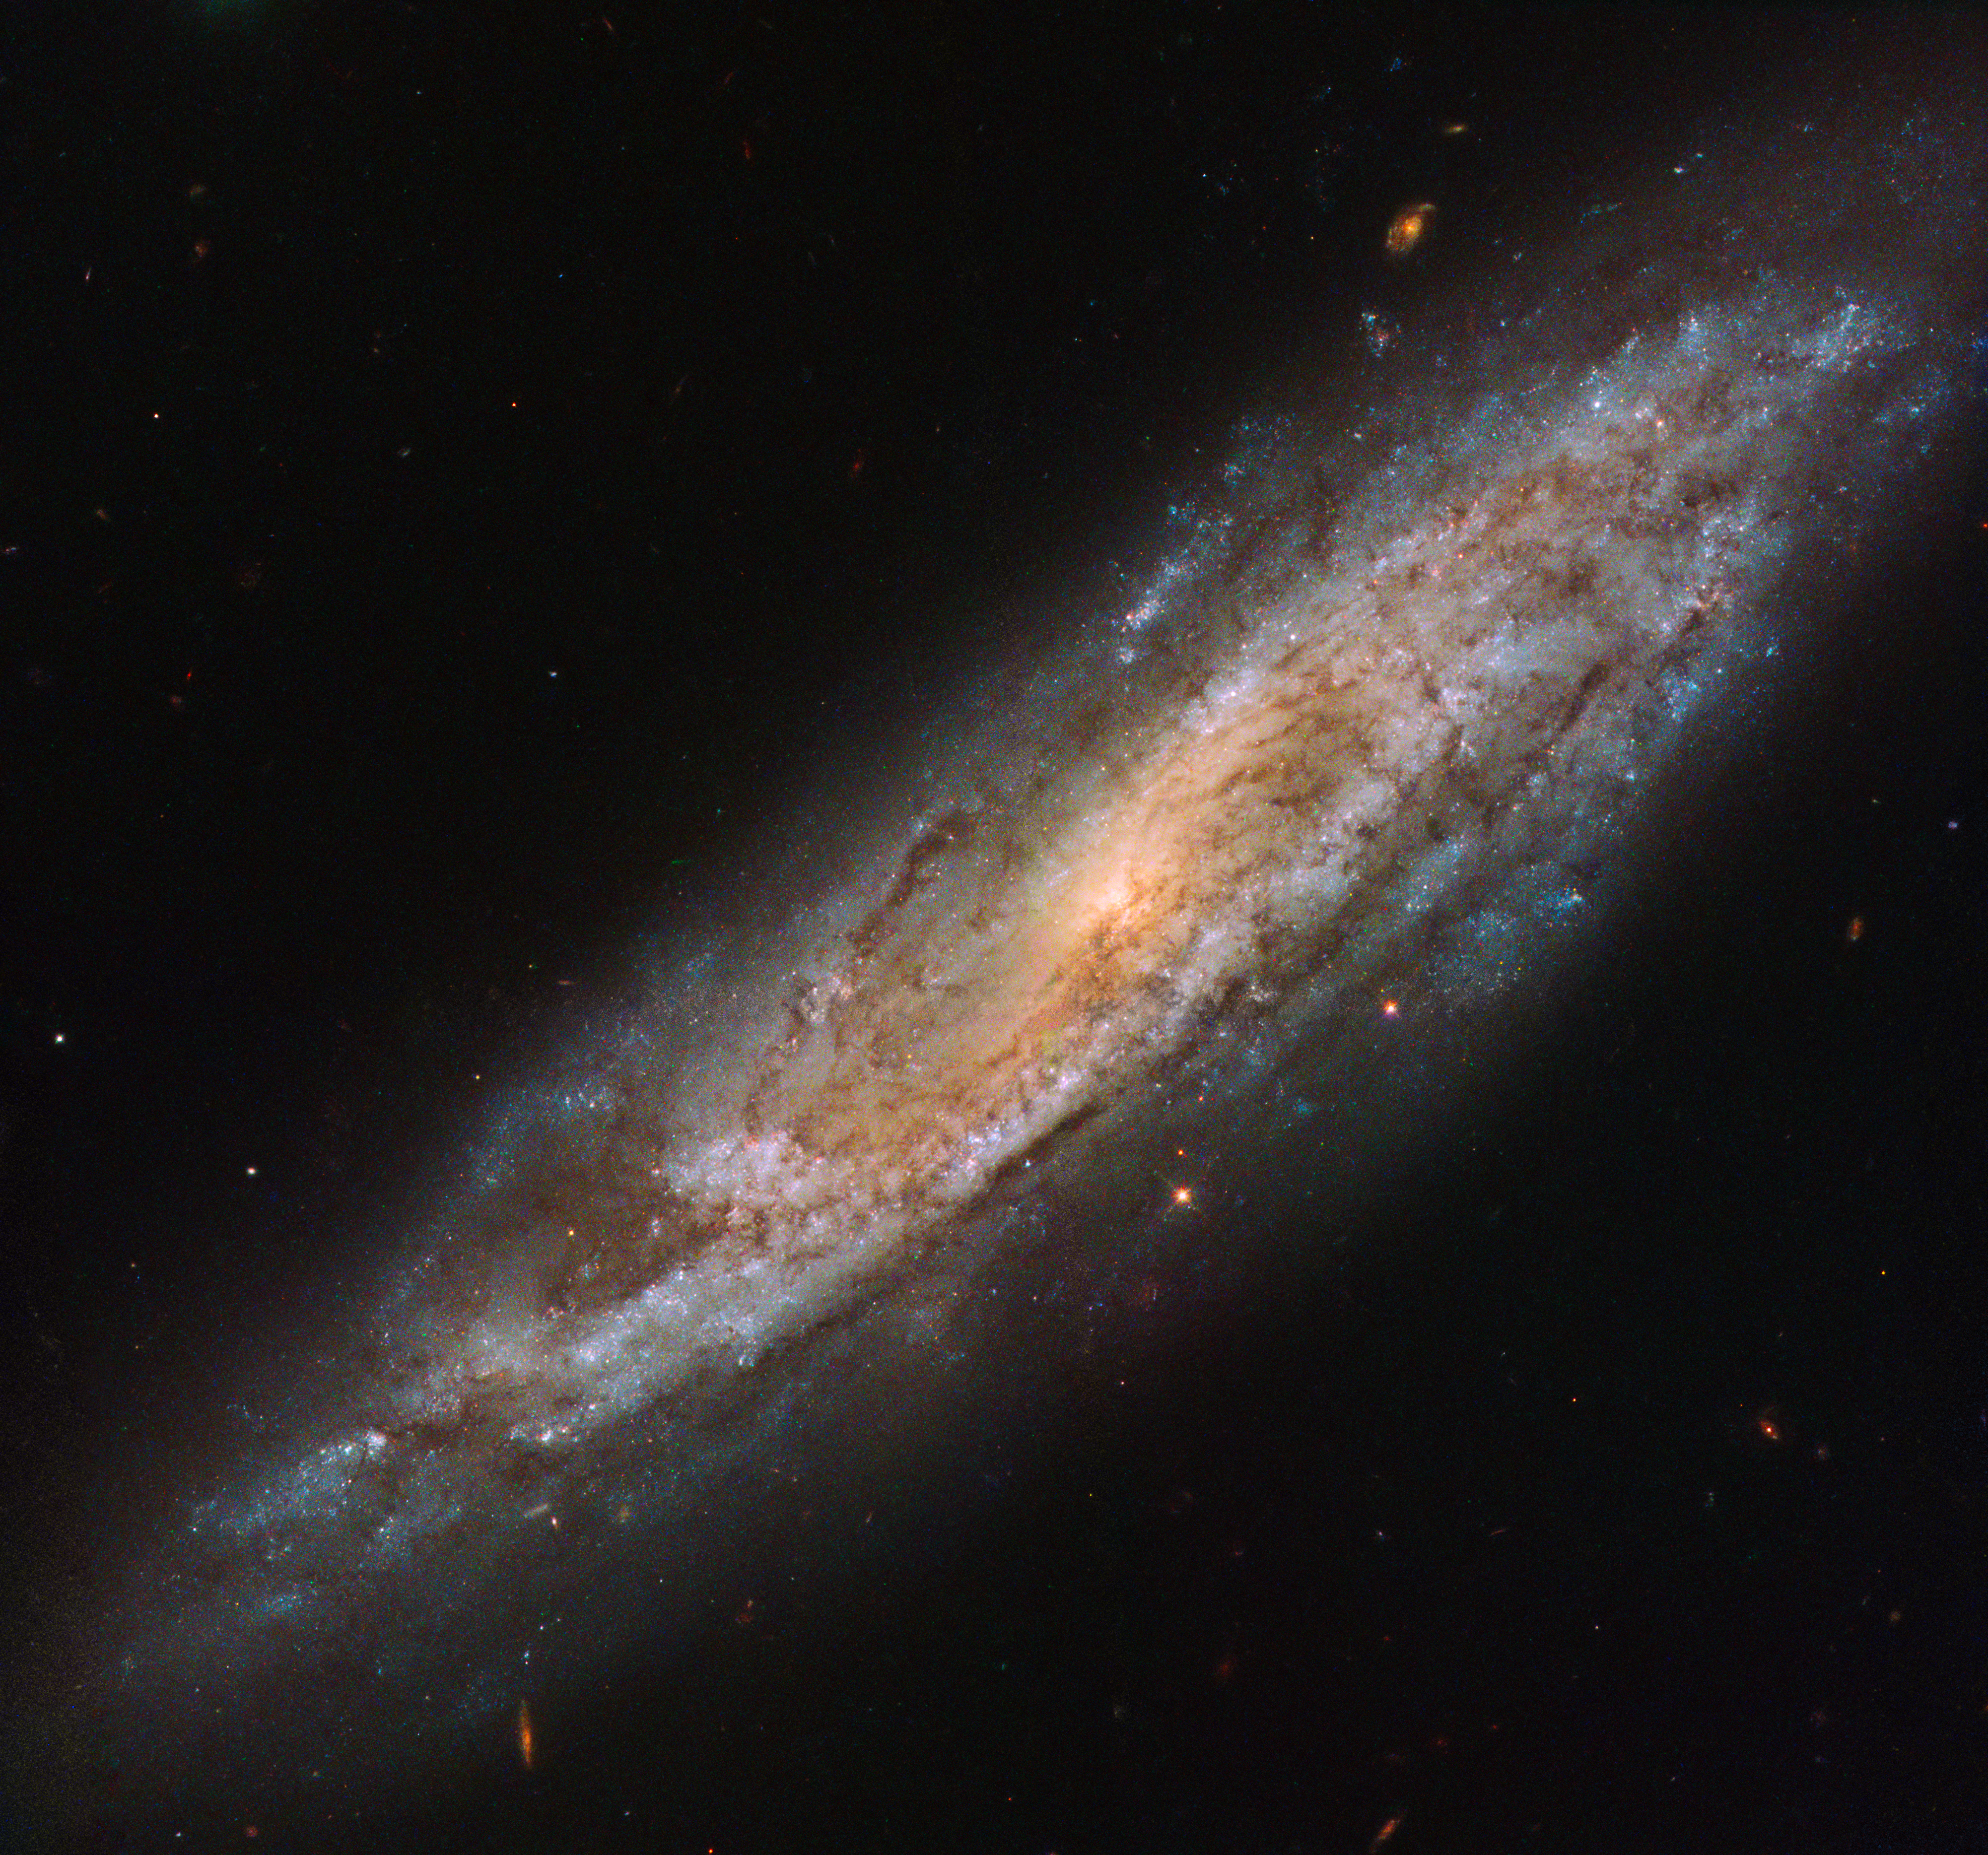

Imposter or the Real Deal?

This Picture of the Week, taken by the NASA/ESA Hubble Space Telescope, shows a close-up view of a galaxy named NGC 2770. NGC 2770 is intriguing, as over time it has hosted four different observed supernovae (not visible here).

Supernovae form in a few different ways, but always involve a dying star. These stars become unbalanced, lose control, and explode violently, briefly shining as brightly as an entire galaxy before slowly fading away.

One of the four supernovae observed within this galaxy, SN 2015bh, is especially interesting. This particular supernova initially had its identity called into question. When it was first discovered in 2015, astronomers classified SN 2015bh as a supernova imposter, believing it to be not an exploding star but simply an unpredictable outburst from a massive star in its final phase of life. Thankfully, astronomers eventually discovered the truth and the object was given its correct classification as a Type II supernova, resulting from the death of a star between eight and 50 times the mass of the Sun.

Credit: ESA/Hubble & NASA, A. Filippenko